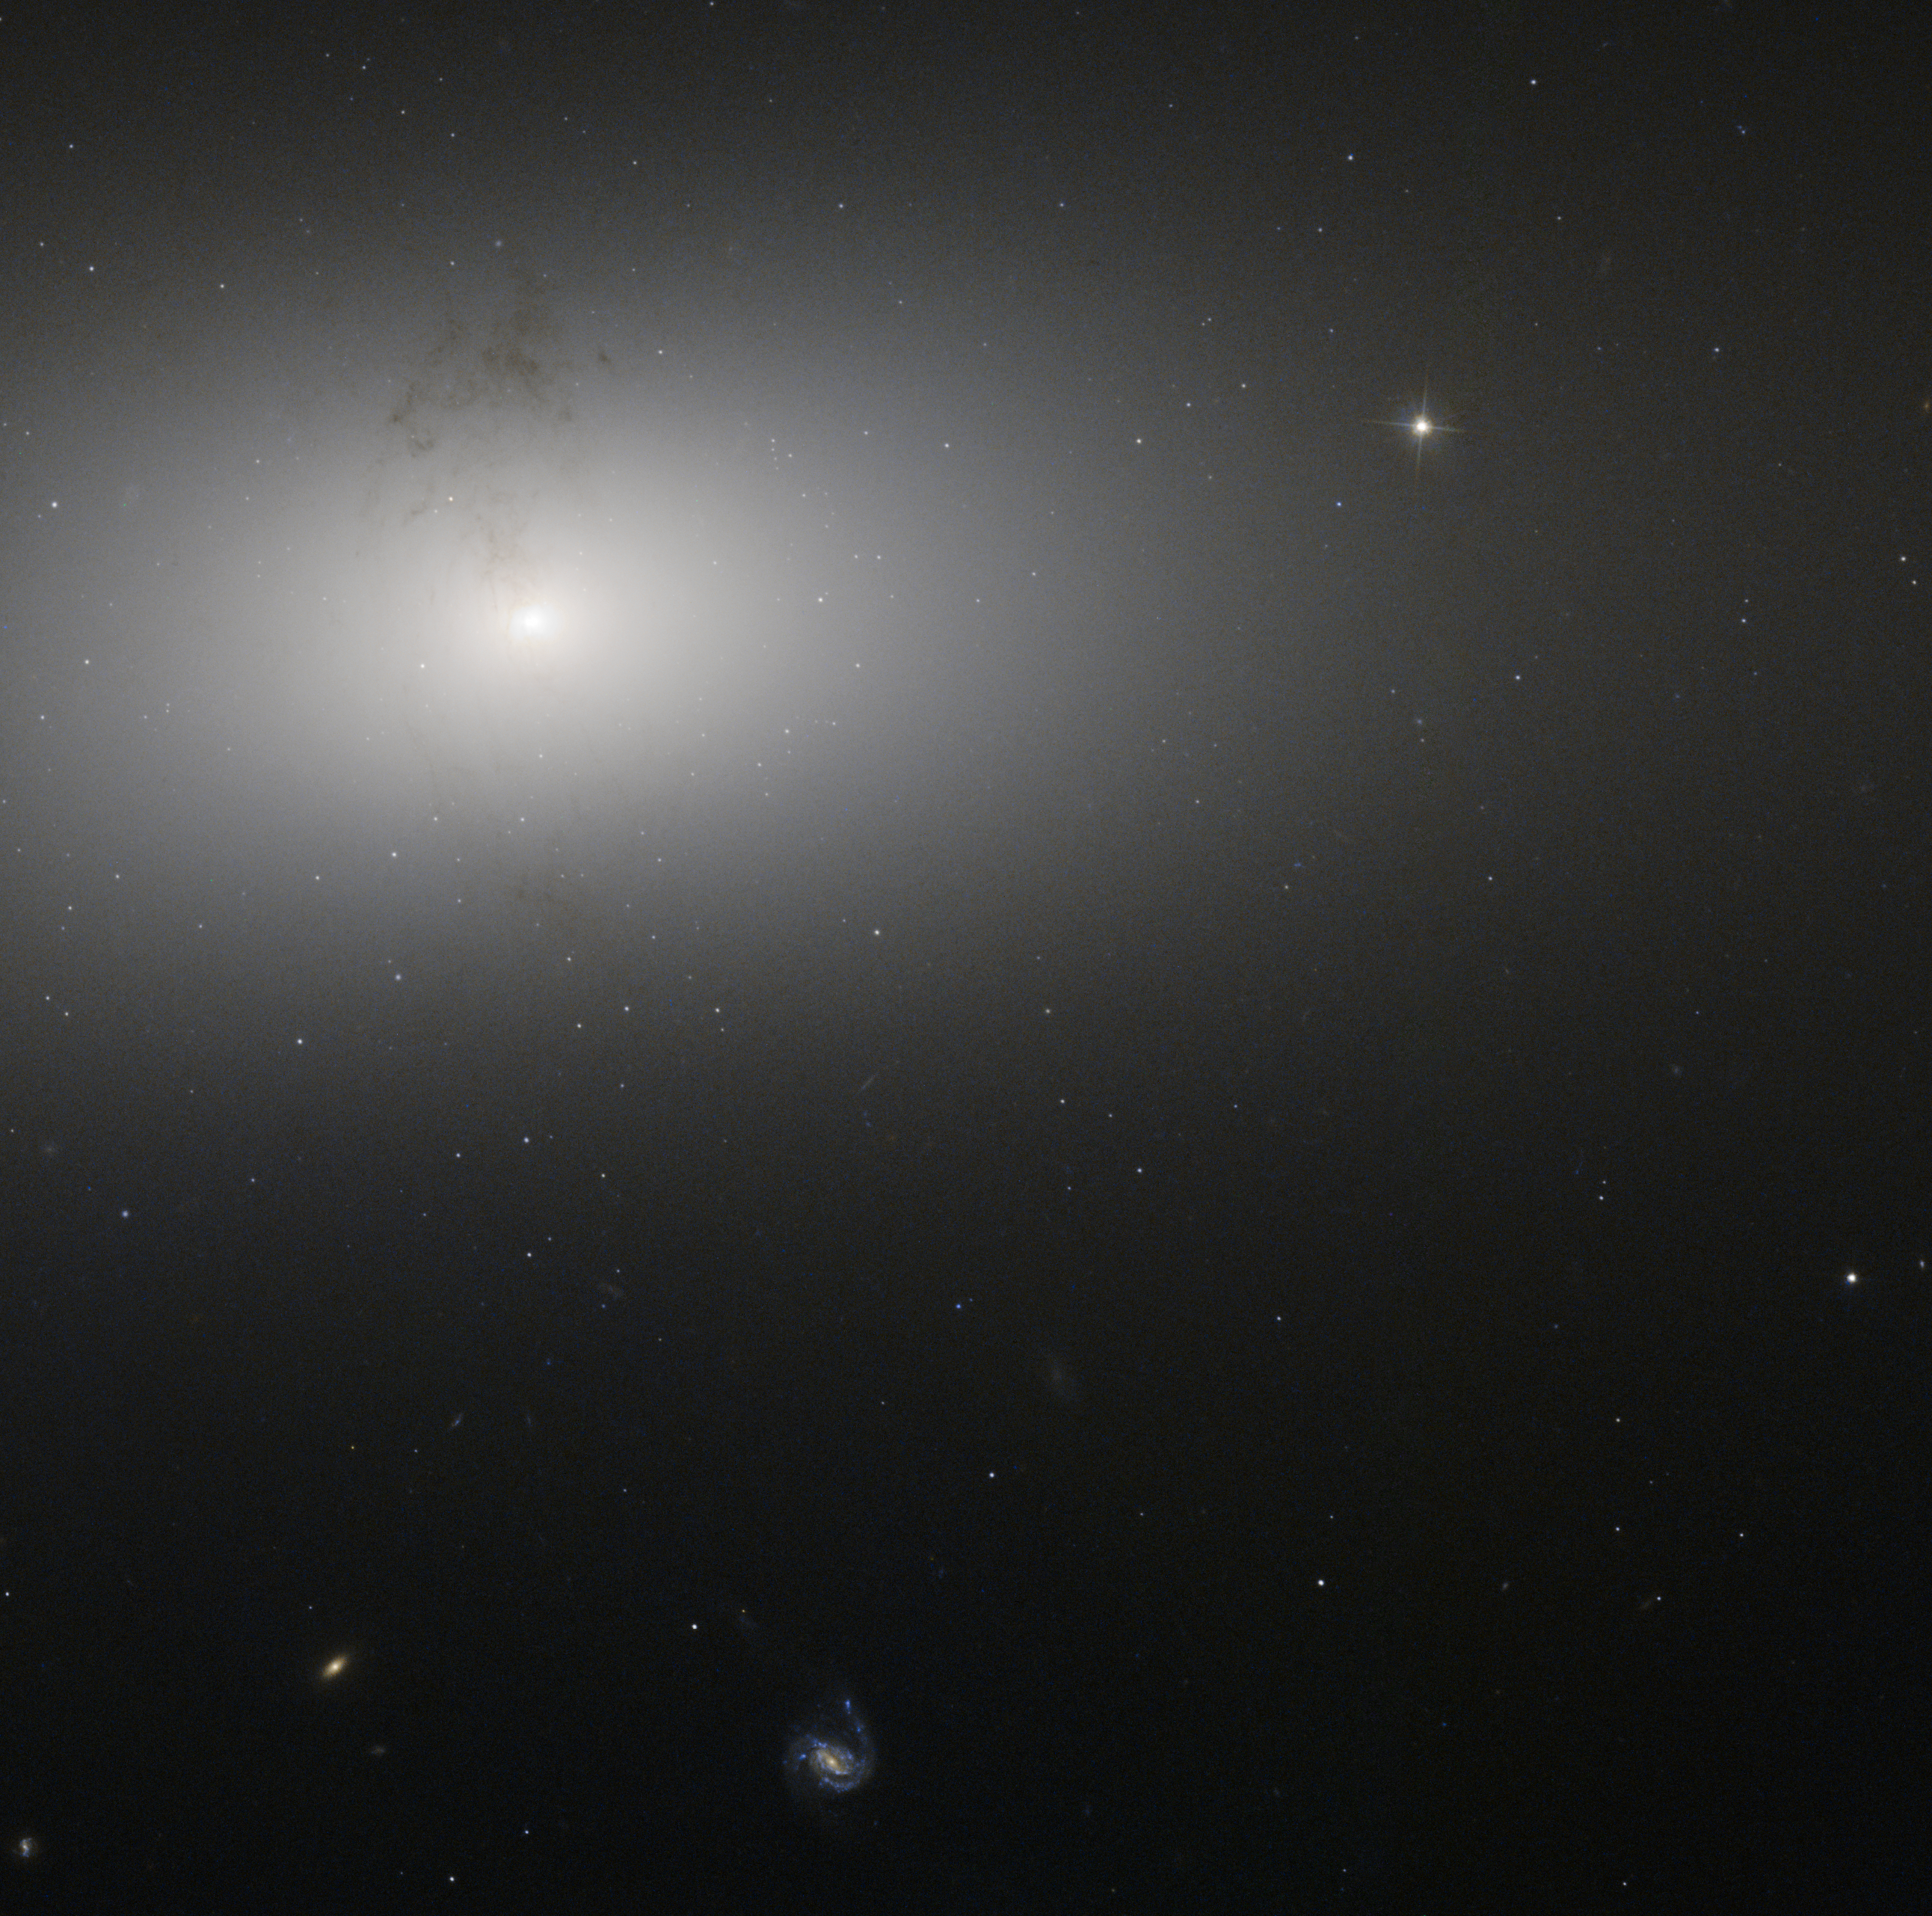

Dusty detail in elliptical galaxy NGC 2768

The soft glow in the picture above is NGC 2768, an elliptical galaxy located in the northern constellation of Ursa Major (The Great Bear). It appears here as a bright oval on the sky, surrounded by a wide, fuzzy cloud of material. This image, taken by the NASA/ESA Hubble Space Telescope, shows the dusty structure encircling the centre of the galaxy, forming a knotted ring around the galaxy’s brightly glowing middle. Interestingly, this ring lies perpendicular to the plane of NGC 2768 itself, stretching up and out of the galaxy.

The dust in NGC 2768 forms an intricate network of knots and filaments. In the centre of the galaxy are two tiny, S-shaped symmetric jets. These two flows of material travel outwards from the galactic centre along curved paths, and are masked by the tangle of dark dust lanes that spans the body of the galaxy.

These jets are a sign of a very active centre. NGC 2768 is an example of a Seyfert galaxy, an object with a supermassive black hole at its centre. This speeds up and sucks in gas from the nearby space, creating a stream of material swirling inwards towards the black hole known as an accretion disc. This disk throws off material in very energetic outbursts, creating structures like the jets seen in the image above.

A version of this image was entered into the Hubble's Hidden Treasures image processing competition by contestant Judy Schmidt. One of her images, of newborn star XZ Tauri, was awarded third prize.

Credit: ESA/Hubble & NASA Acknowledgment: Judy Schmidt